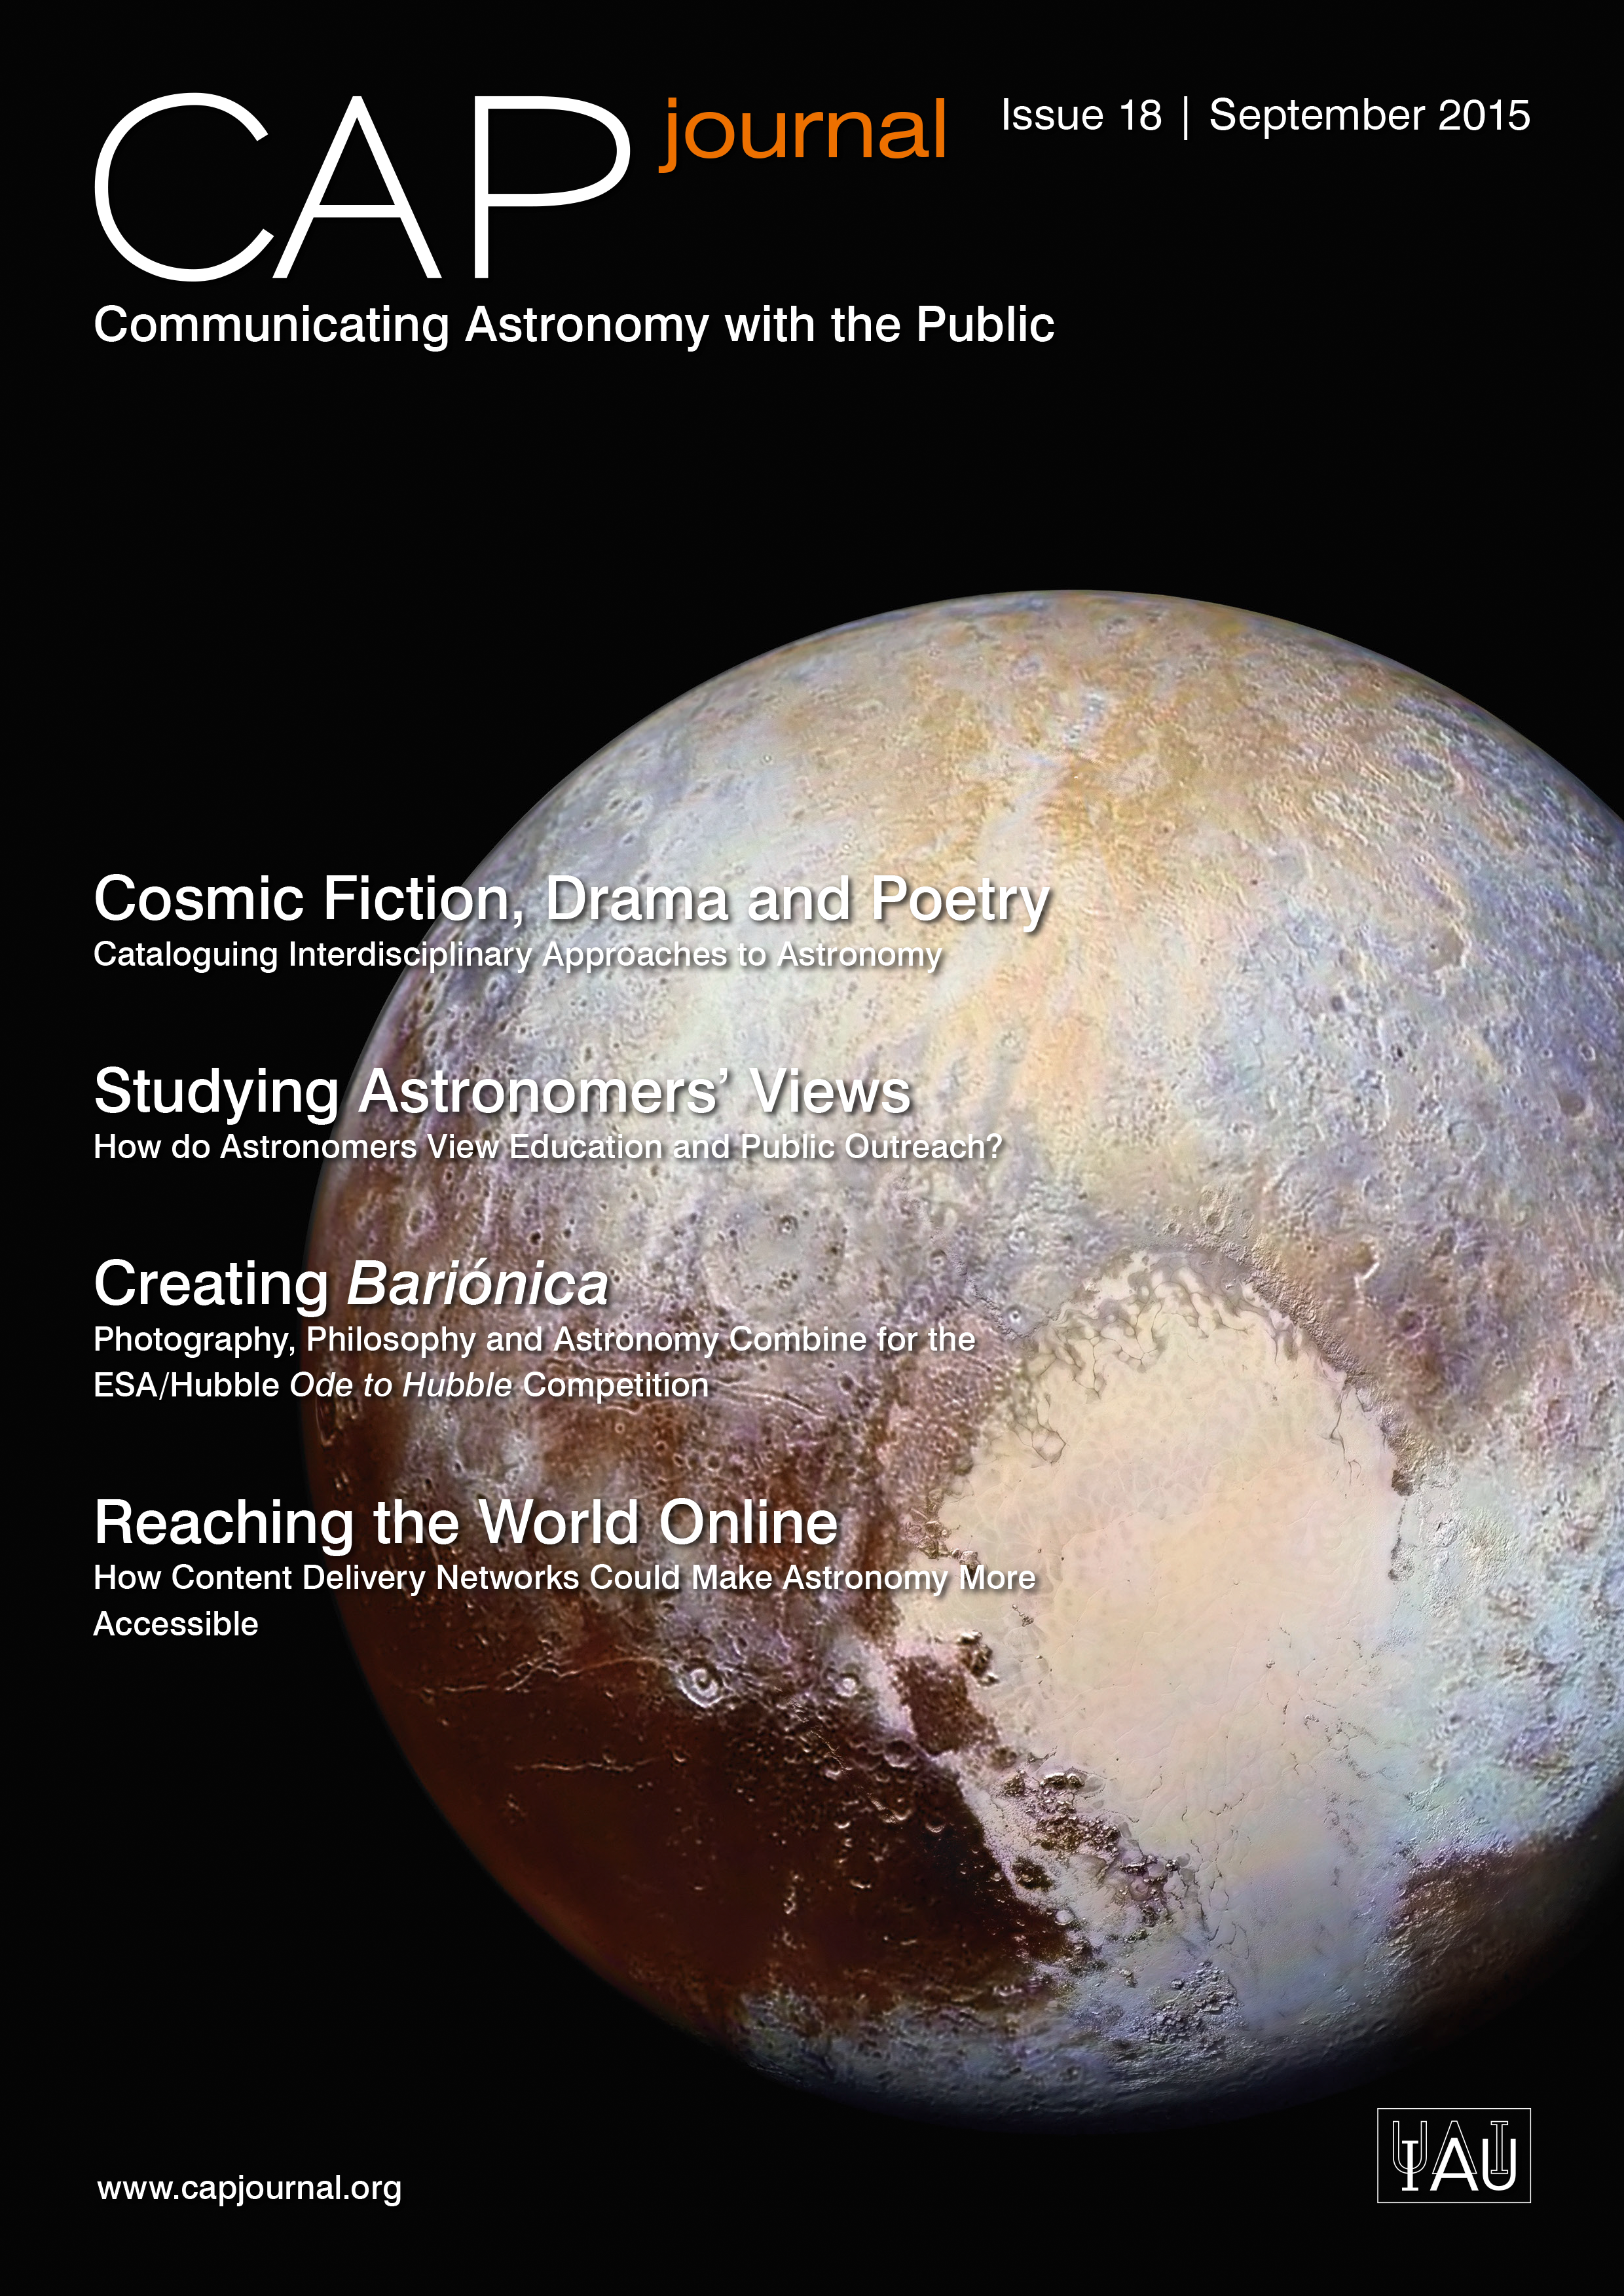

Cover of CAPjournal issue 18

Cover of CAPjournal issue 18.

Credit: ESO